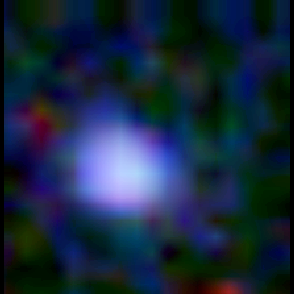

Galaxy building blocks

This is one Proto Galaxy out of a series of 18, taken by the Wide Field Planetary Camera 2.

Credit: Rogier Windhorst and Sam Pascarelle (Arizona State University) and NASA/ESA